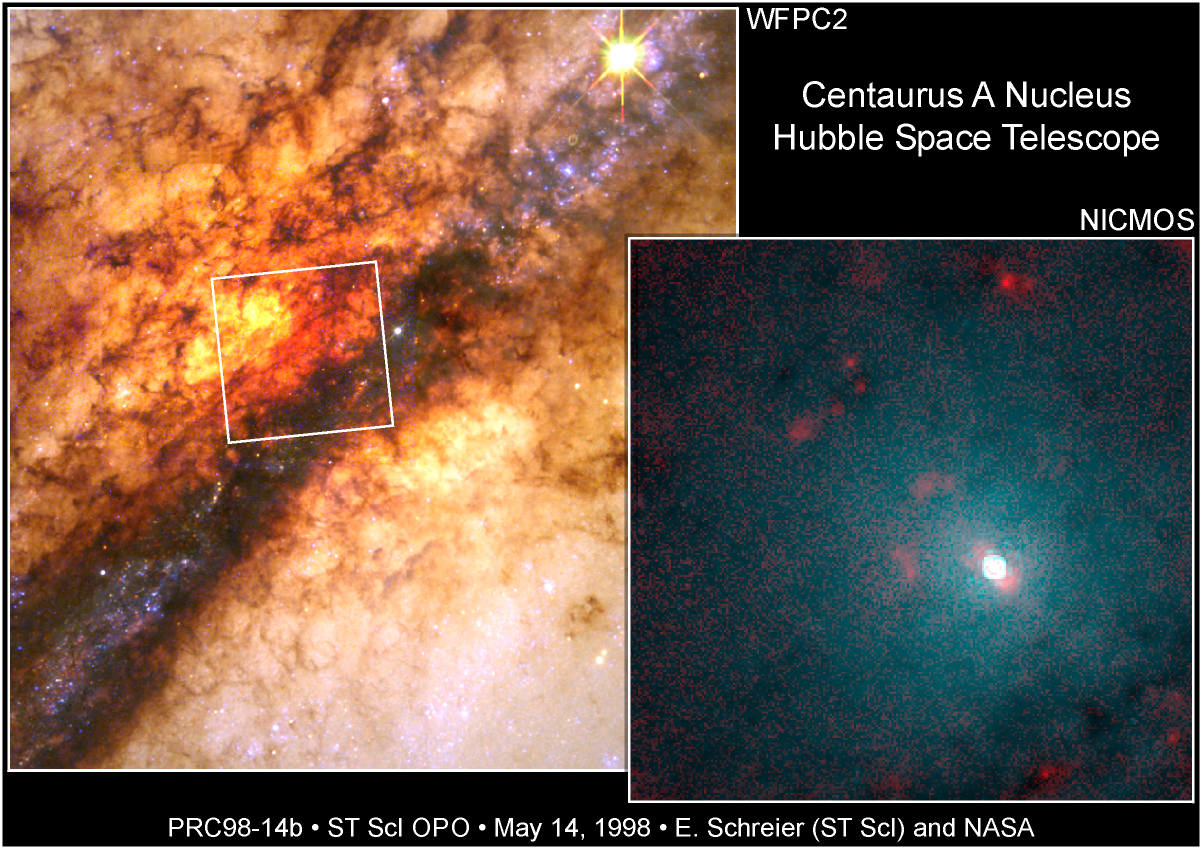

Centaurus A Nucleus

Astronomers have used the NASA/ESA Hubble Space Telescope to probe the core of the nearest active galaxy to Earth, Centaurus A.

Credit: E.J. Schreier, (STScI) and NASA/ESA